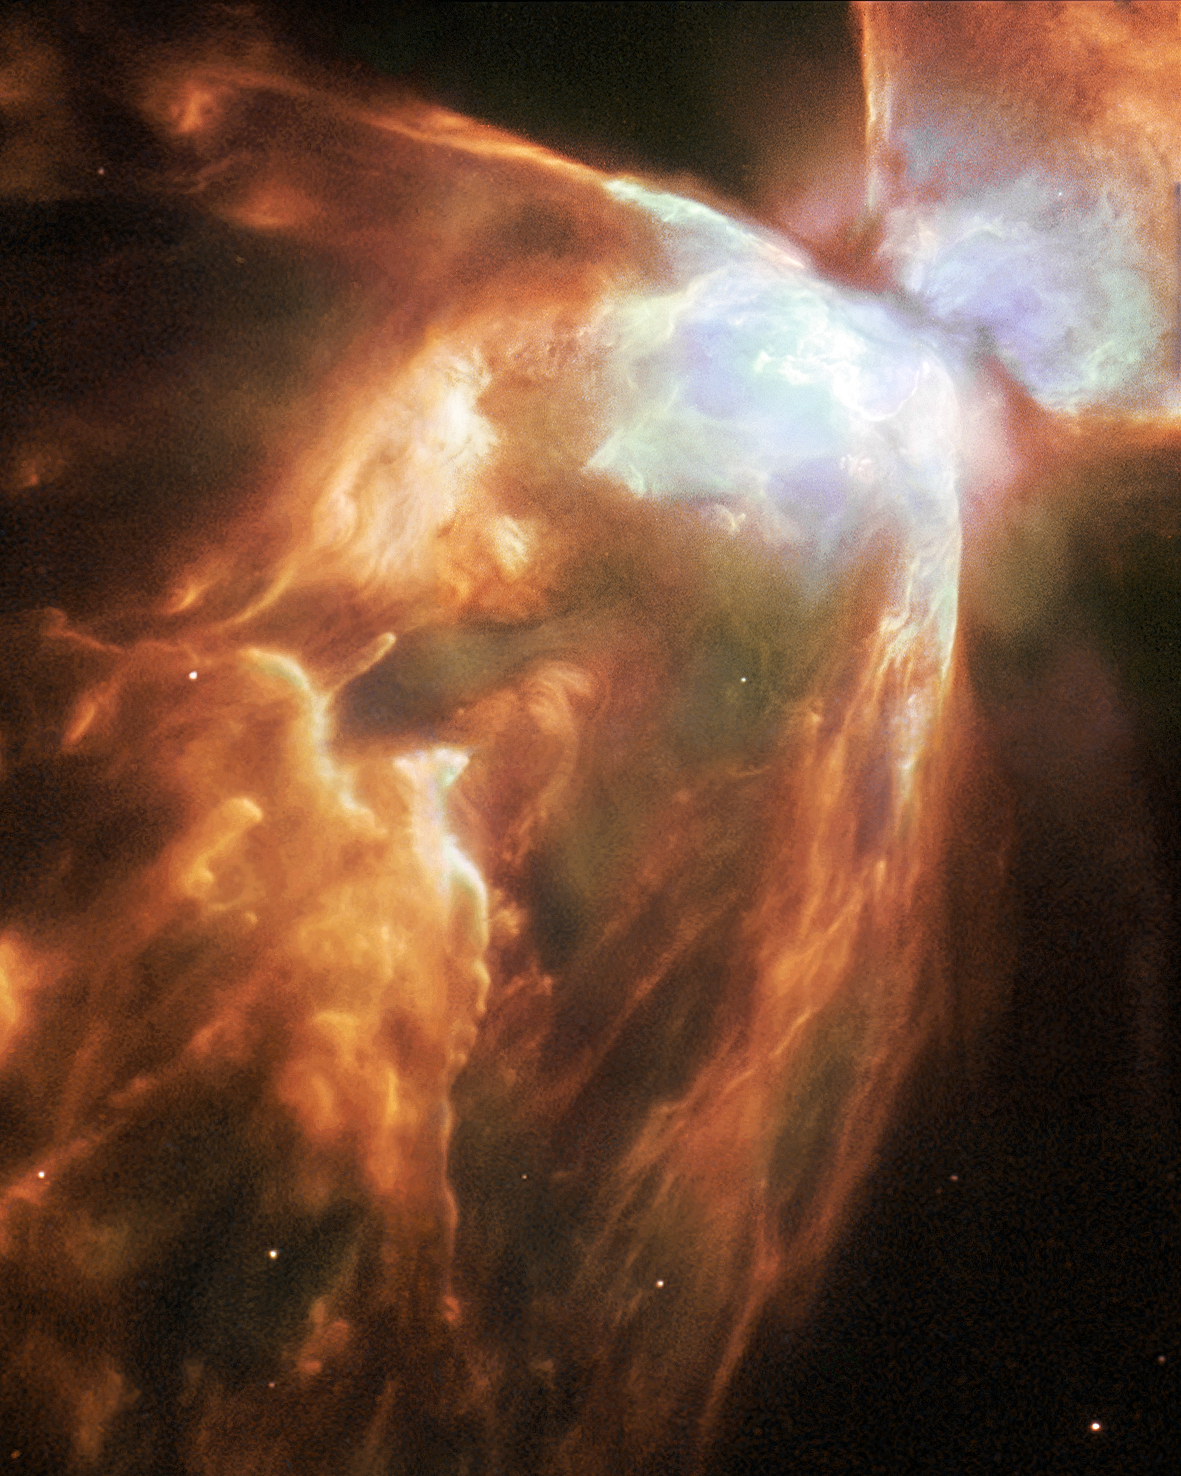

Demise in ice and fire

The Bug Nebula, NGC 6302, is one of the brightest and most extreme planetary nebulae known. At its centre lies a superhot, dying star smothered in a blanket of hailstones. A new Hubble image reveals fresh detail in the wings of this cosmic butterfly.

Most planetary nebulae are distinctive, but few are as extreme as NGC 6302, also known as the Bug Nebula. The fiery, dying star at its centre is shrouded by a blanket of icy hailstones.

Credit: ESA/NASA and Albert Zijlstra